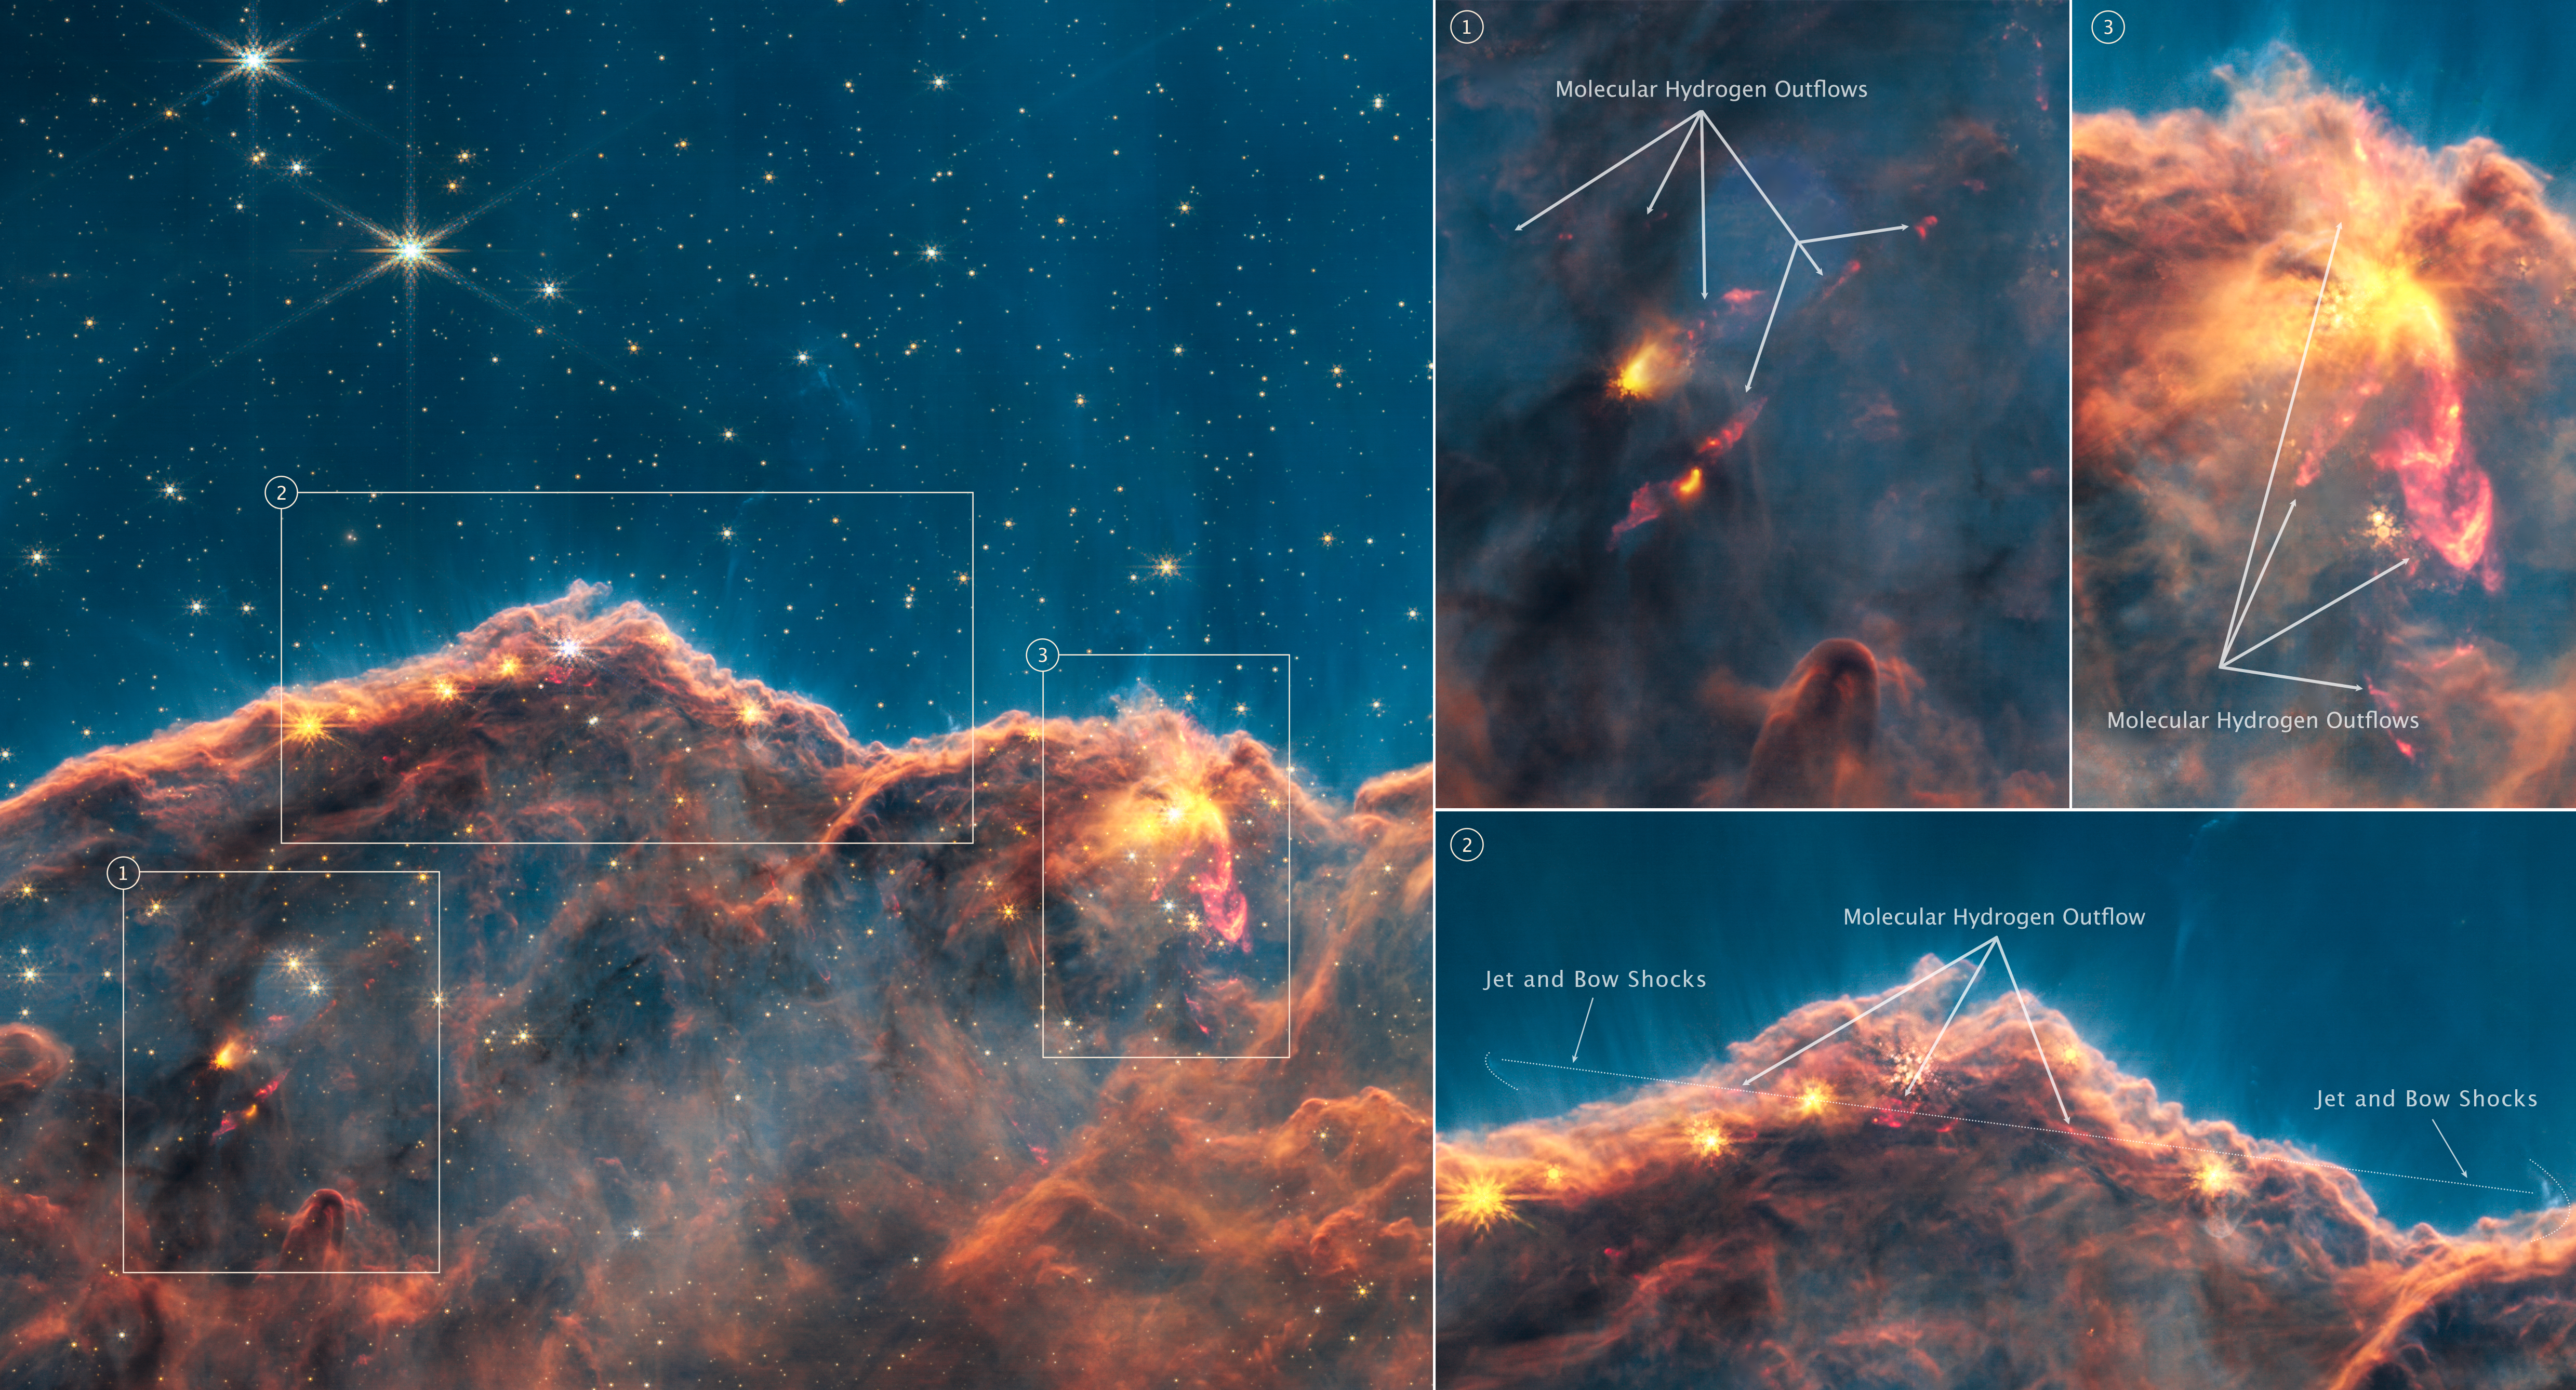

Carina Nebula Jets (NIRCam Narrowband Filters - Annotated)

Scientists taking a “deep dive” into one of the iconic first images from the NASA/ESA/CSA James Webb Space Telescope have discovered dozens of energetic jets and outflows from young stars previously hidden by dust clouds. The discovery marks the beginning of a new era of investigating how stars like our Sun form, and how the radiation from nearby massive stars might affect the development of planets.

Dozens of previously hidden jets and outflows from young stars are revealed in this new image from Webb’s Near-Infrared Camera (NIRCam). This image separates out several wavelengths of light from the First Image revealed on 12 July 2022, which highlights molecular hydrogen, a vital ingredient for star formation. Insets on the right-hand side highlight three regions of the Cosmic Cliffs with particularly active molecular hydrogen outflows.

The Cosmic Cliffs, a region at the edge of a gigantic, gaseous cavity within the star cluster NGC 3324, has long intrigued astronomers as a hotbed for star formation. While well-studied by the NASA/ESA Hubble Space Telescope, many details of star formation in NGC 3324 remain hidden at visible-light wavelengths. Webb is perfectly primed to tease out these long-sought-after details since it is built to detect jets and outflows seen only in the infrared at high resolution. Webb’s capabilities also allow researchers to track the movement of other features previously captured by Hubble.

Recently, by analyzing data from a specific wavelength of infrared light (4.7 microns), astronomers discovered two dozen previously unknown outflows from extremely young stars revealed by molecular hydrogen. Webb’s observations uncovered a gallery of objects ranging from small fountains to burbling behemoths that extend light-years from the forming stars. Many of these protostars are poised to become low mass stars, like our Sun.

Molecular hydrogen is a vital ingredient for making new stars and an excellent tracer of the early stages of their formation. As young stars gather material from the gas and dust that surround them, most also eject a fraction of that material back out again from their polar regions in jets and outflows. These jets then act like a snowplow, bulldozing into the surrounding environment. Visible in Webb’s observations is the molecular hydrogen getting swept up and excited by these jets.

Previous observations of jets and outflows looked mostly at nearby regions and more evolved objects that are already detectable in the visual wavelengths seen by Hubble. The unparalleled sensitivity of Webb allows observations of more distant regions, while its infrared optimization probes into the dust-sampling younger stages. Together this provides astronomers with an unprecedented view into environments that resemble the birthplace of our solar system.

In analyzing the new Webb observations, astronomers are also gaining insights into how active these star-forming regions are, even in a relatively short time span. By comparing the position of previously known outflows in this region caught by Webb, to archival data by Hubble from 16 years ago, the scientists were able to track the speed and direction in which the jets are moving.

This science was conducted on observations collected as part of Webb’s Early Release Observations Program. The paper was published in the Monthly Notices of the Royal Astronomical Society in December 2022.

In this image, red, green, and blue were assigned to Webb’s NIRCam data at 4.7, 4.44, and 1.87 microns (F470N, F444W, and F187N filters, respectively).

Credit: NASA, ESA, CSA, and STScI, J. DePasquale (STScI)